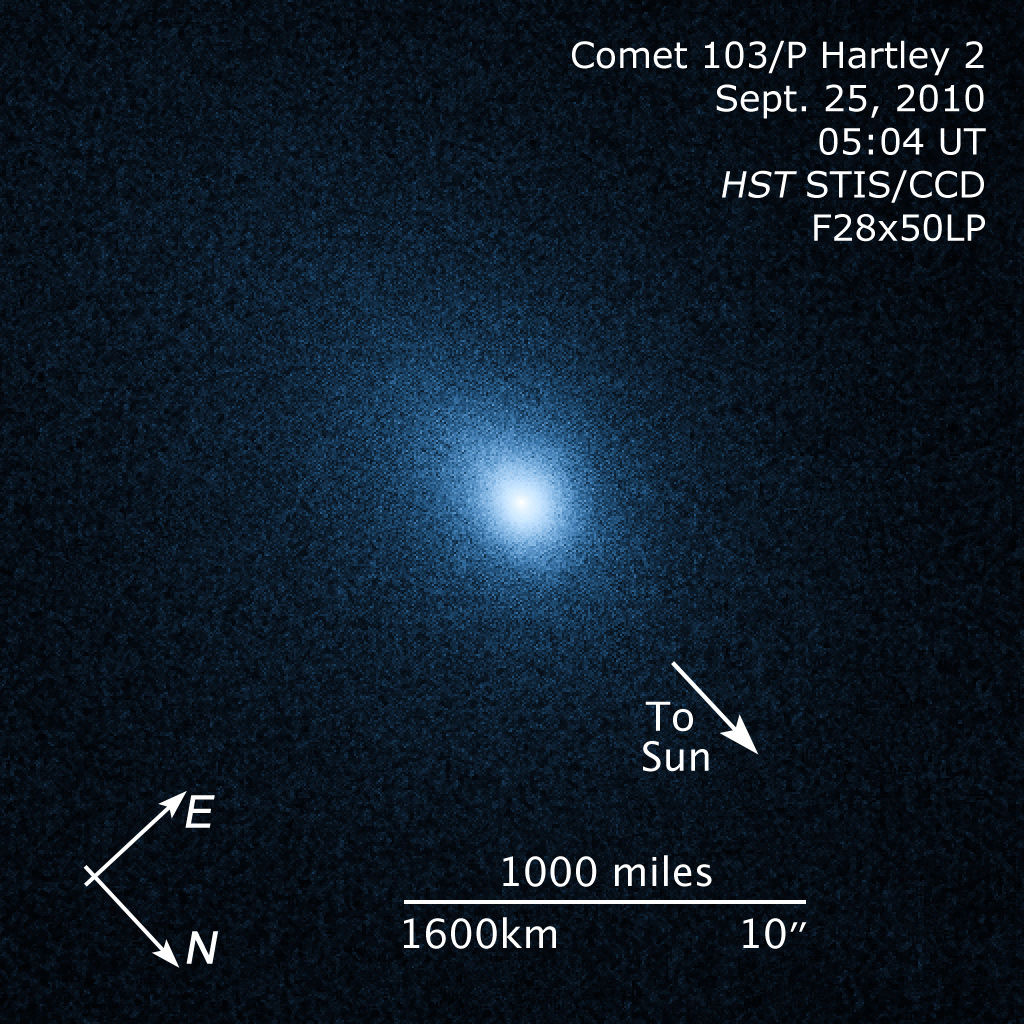

Compass and scale image for comet 103/P Hartley 2

Compass and scale image for comet 103/P Hartley 2.

Credit: NASA, ESA, and Z. Levay (STScI). Science Credit: NASA, ESA, and H. Weaver (The Johns Hopkins University/Applied Physics Lab, USA)